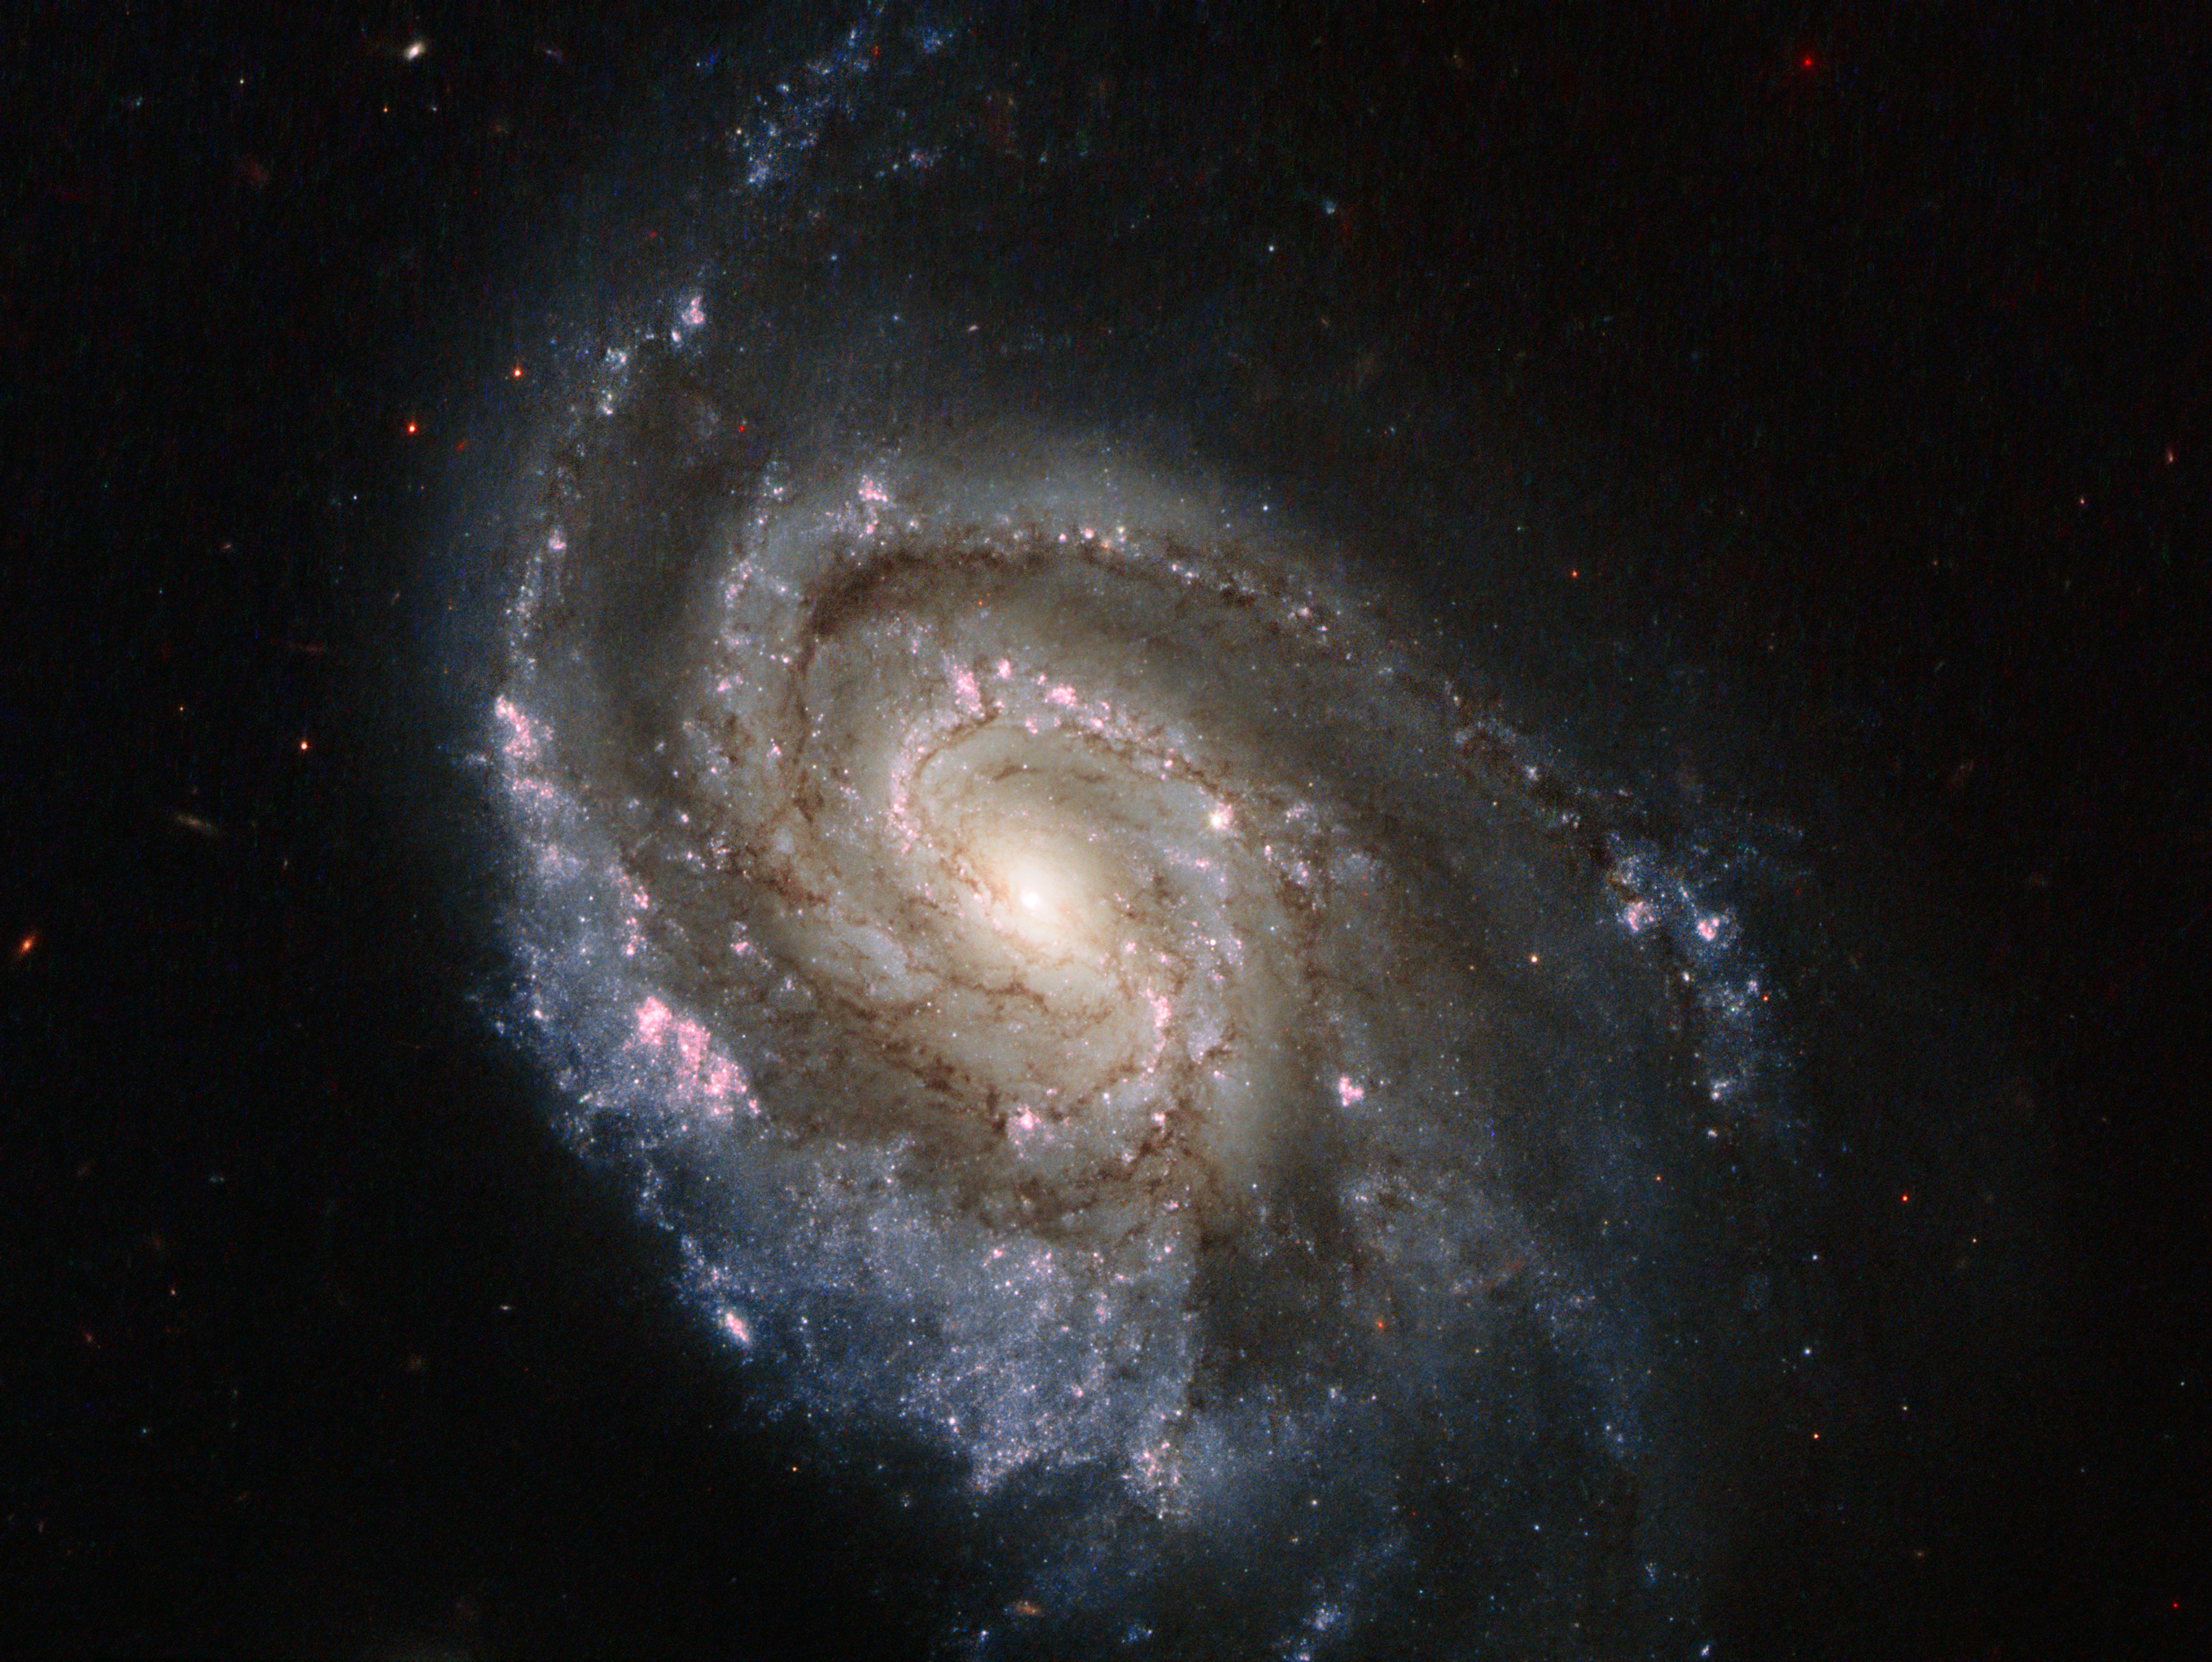

Stellar explosions in NGC 6984

Supernovae are intensely bright objects. They are formed when a star reaches the end of its life with a dramatic explosion, expelling most of its material out into space. The subject of this new Hubble image, spiral galaxy NGC 6984, played host to one of these explosions back in 2012, known as SN 2012im. Now, another star has exploded, forming supernova SN 2013ek — visible in this image as the prominent, star-like bright object just slightly above and to the right of the galaxy's centre.

SN 2012im is known as a Type Ic supernova, while the more recent SN 2013ek is a Type Ib. Both of these types are caused by the core collapse of massive stars that have shed — or lost — their outer layers of hydrogen. Type Ic supernovae are thought to have lost more of their outer envelope than Type Ib, including a layer of helium.

The observations that make up this new image were taken on 19 August 2013, and aimed to pinpoint the location of this new explosion more precisely. It is so close to where SN 2012im was spotted that the two events are thought to be linked; the chance of two completely independent supernovae so close together and of the same class exploding within one year of one another is a very unlikely event. It was initially suggested that SN 2013ek may in fact be SN 2012im flaring up again, but further observations support the idea that they are separate supernovae — although they may be closely related in some as-yet-unknown way.

Credit: ESA/Hubble & NASA